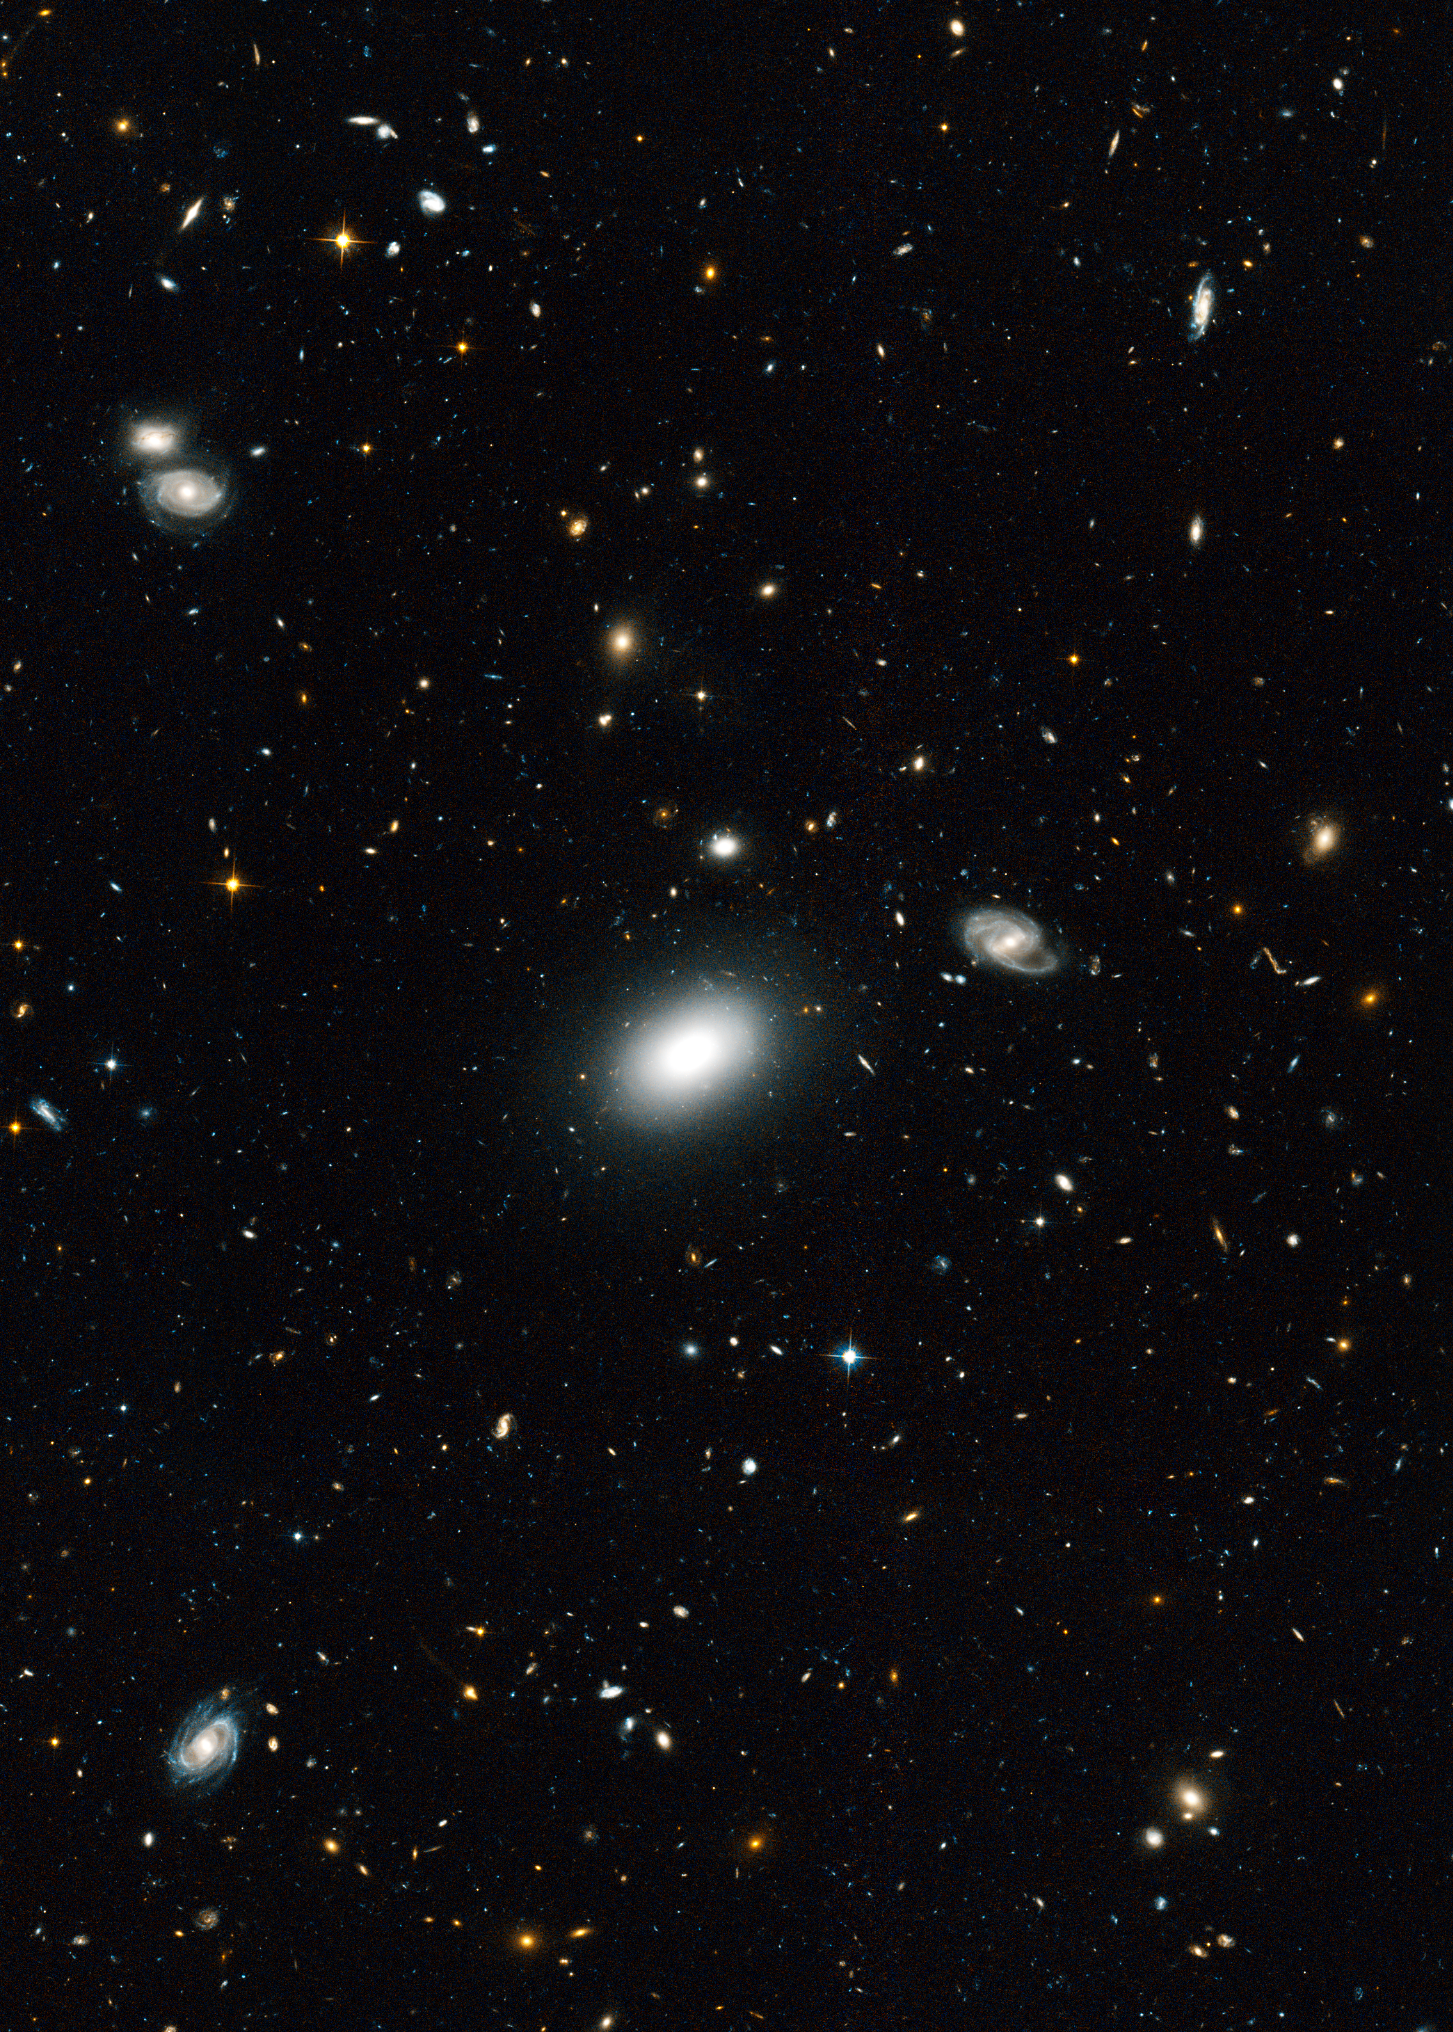

Extended Groth Strip - Detail of Hubble Image

Detail of the Hubble image of the Extended Groth Strip (EGS). The EGS, named after Princeton University physicist Edward Groth, is a small region in the constellation Ursa Major, based on the results of a series of observations by the Hubble Space Telescope. The Extended Groth Strip is 1.1 degrees long by 0.15 degrees wide (70.5 x 10.1 arcminutes, respectively).

Credit: NASA, ESA, and M. Davis (University of California, Berkeley)